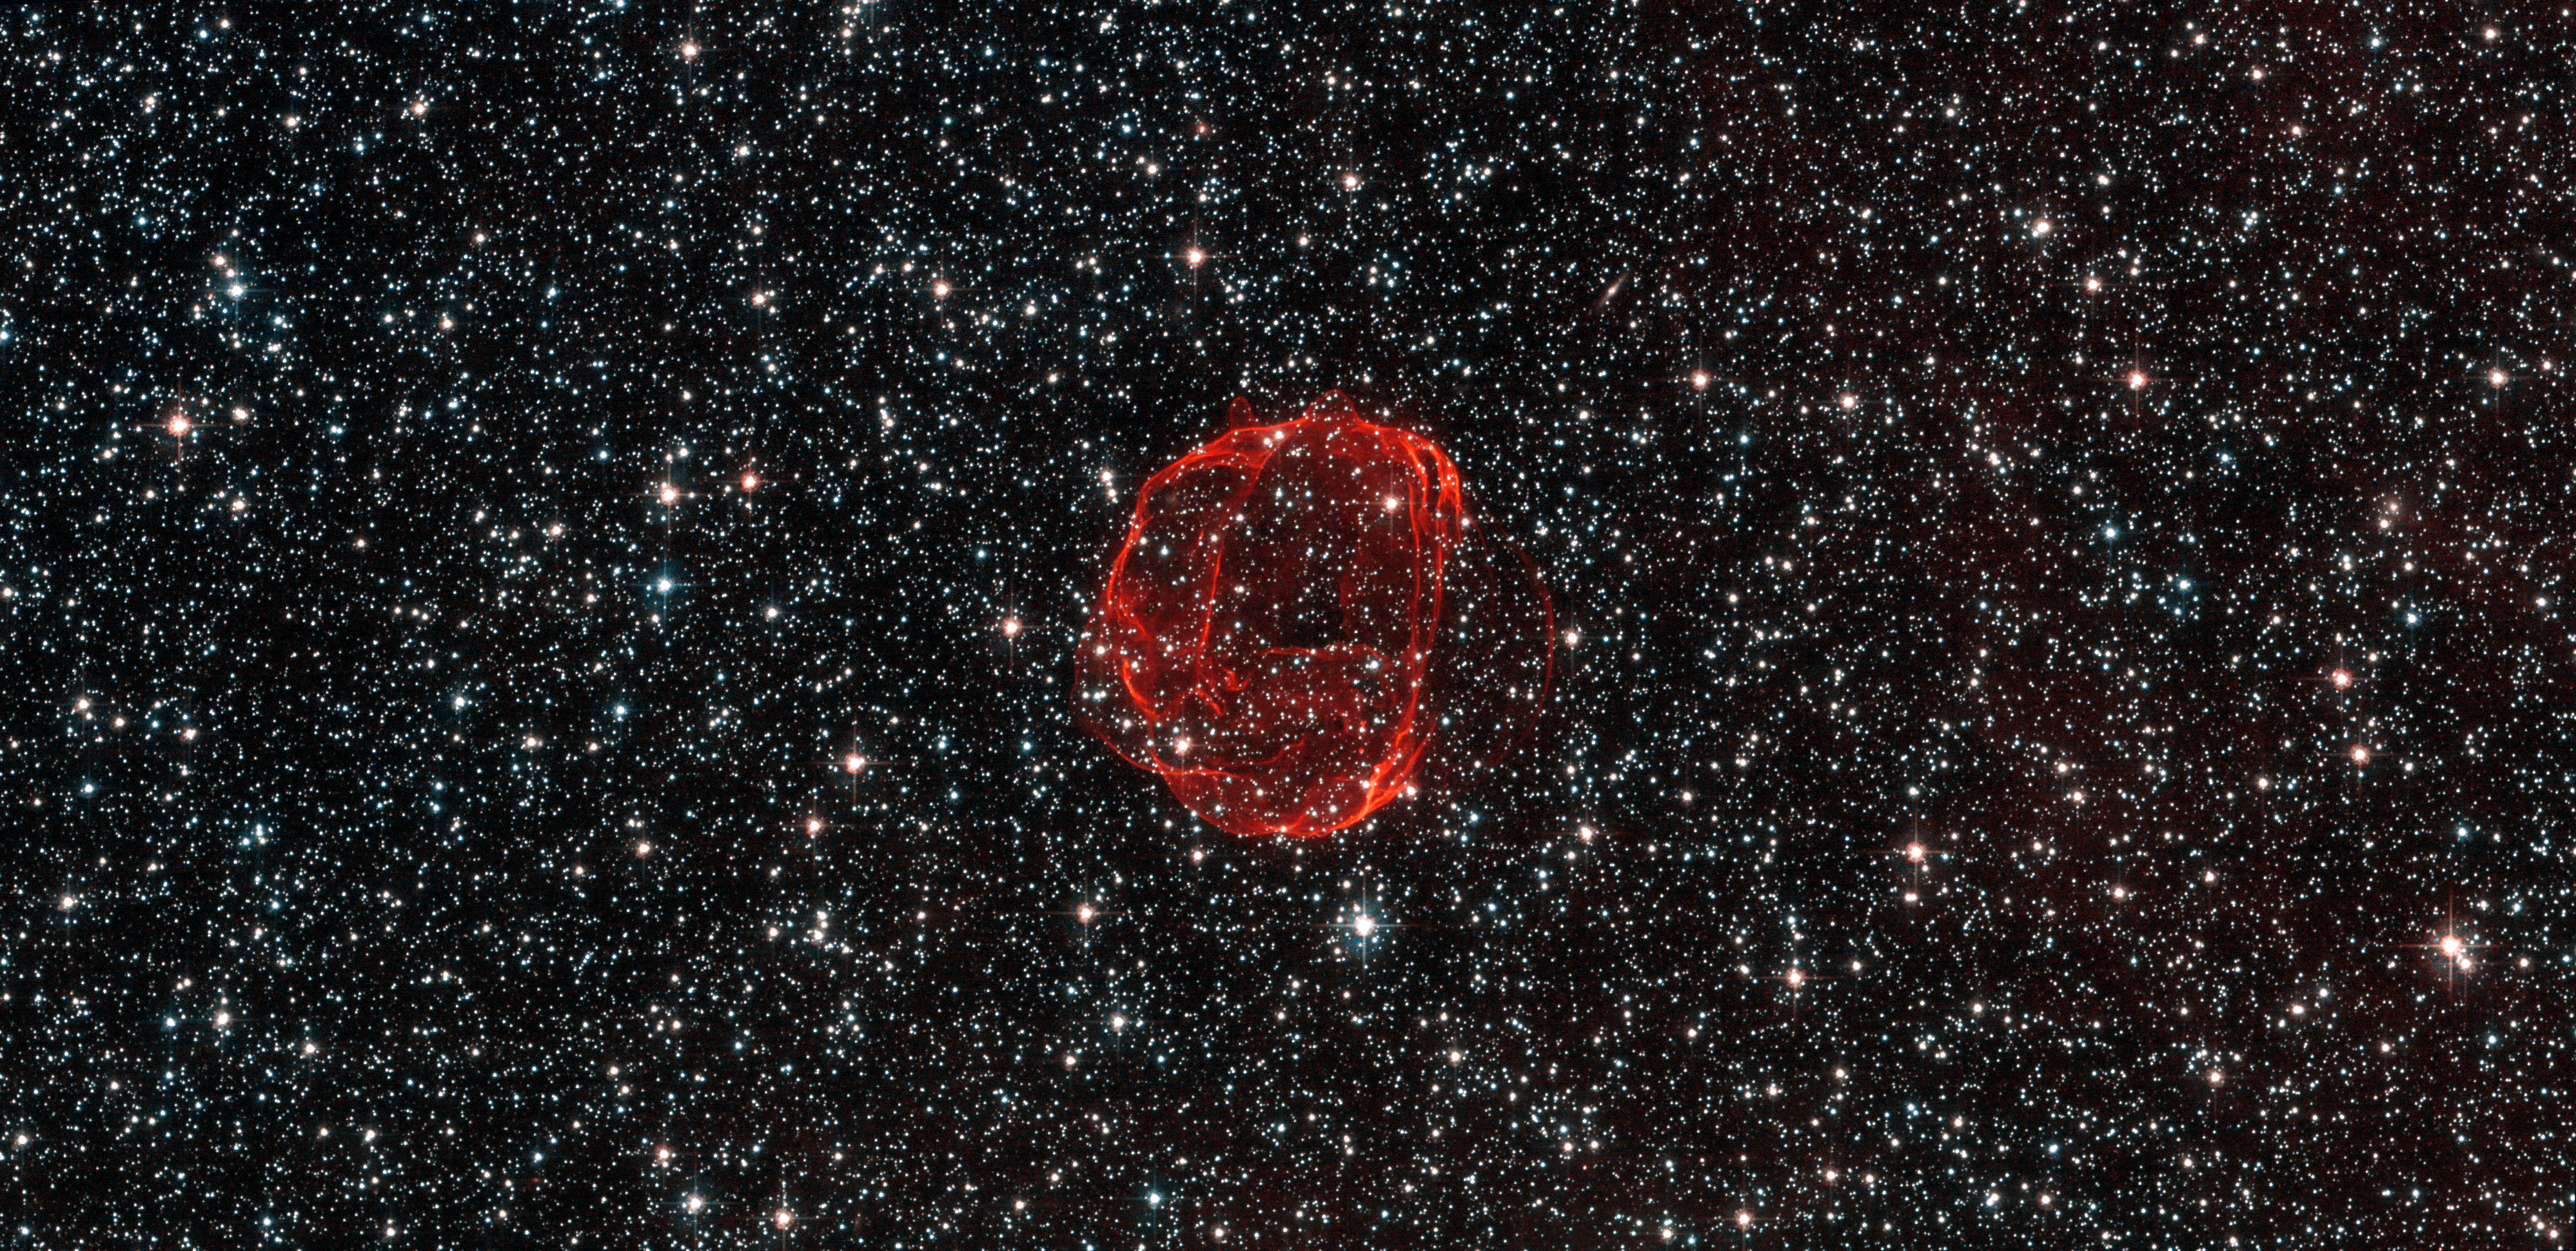

The remains of a star gone supernova

These delicate wisps of gas make up an object known as SNR B0519-69.0, or SNR 0519 for short. The thin, blood-red shells are actually the remnants from when an unstable progenitor star exploded violently as a supernova around 600 years ago. There are several types of supernova, but for SNR 0519 the star that exploded is known to have been a white dwarf star — a Sun-like star in the final stages of its life.

SNR 0519 is located over 150 000 light-years from Earth in the southern constellation of Dorado (The Dolphinfish), a constellation that also contains most of our neighbouring galaxy the Large Magellanic Cloud (LMC). Because of this, this region of the sky is full of intriguing and beautiful deep sky objects.

The LMC orbits the Milky Way galaxy as a satellite and is the fourth largest in our group of galaxies, the Local Group. SNR 0519 is not alone in the LMC; the NASA/ESA Hubble Space Telescope also came across a similar bauble a few years ago in SNR B0509-67.5, a supernova of the same type as SNR 0519 with a strikingly similar appearance.

A version of this image was submitted to the Hubble’s Hidden Treasures Image Processing Competition by Claude Cornen, and won sixth prize.

Credit: ESA/Hubble & NASA. Acknowledgement: Claude Cornen